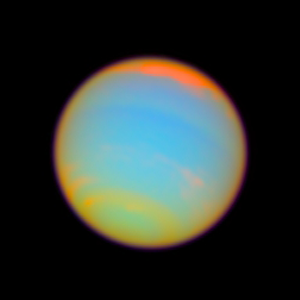

Neptune - enhanced color

This image shows the planet Neptune with its colours enhanced. Astronomers used Hubble’s assortment of filters to pinpoint high altitude clouds floating above the methane rich atmosphere.

Credit: NASA, ESA, E. Karkoschka (University of Arizona), and H.B. Hammel (Space Science Institute, Boulder, Colorado)